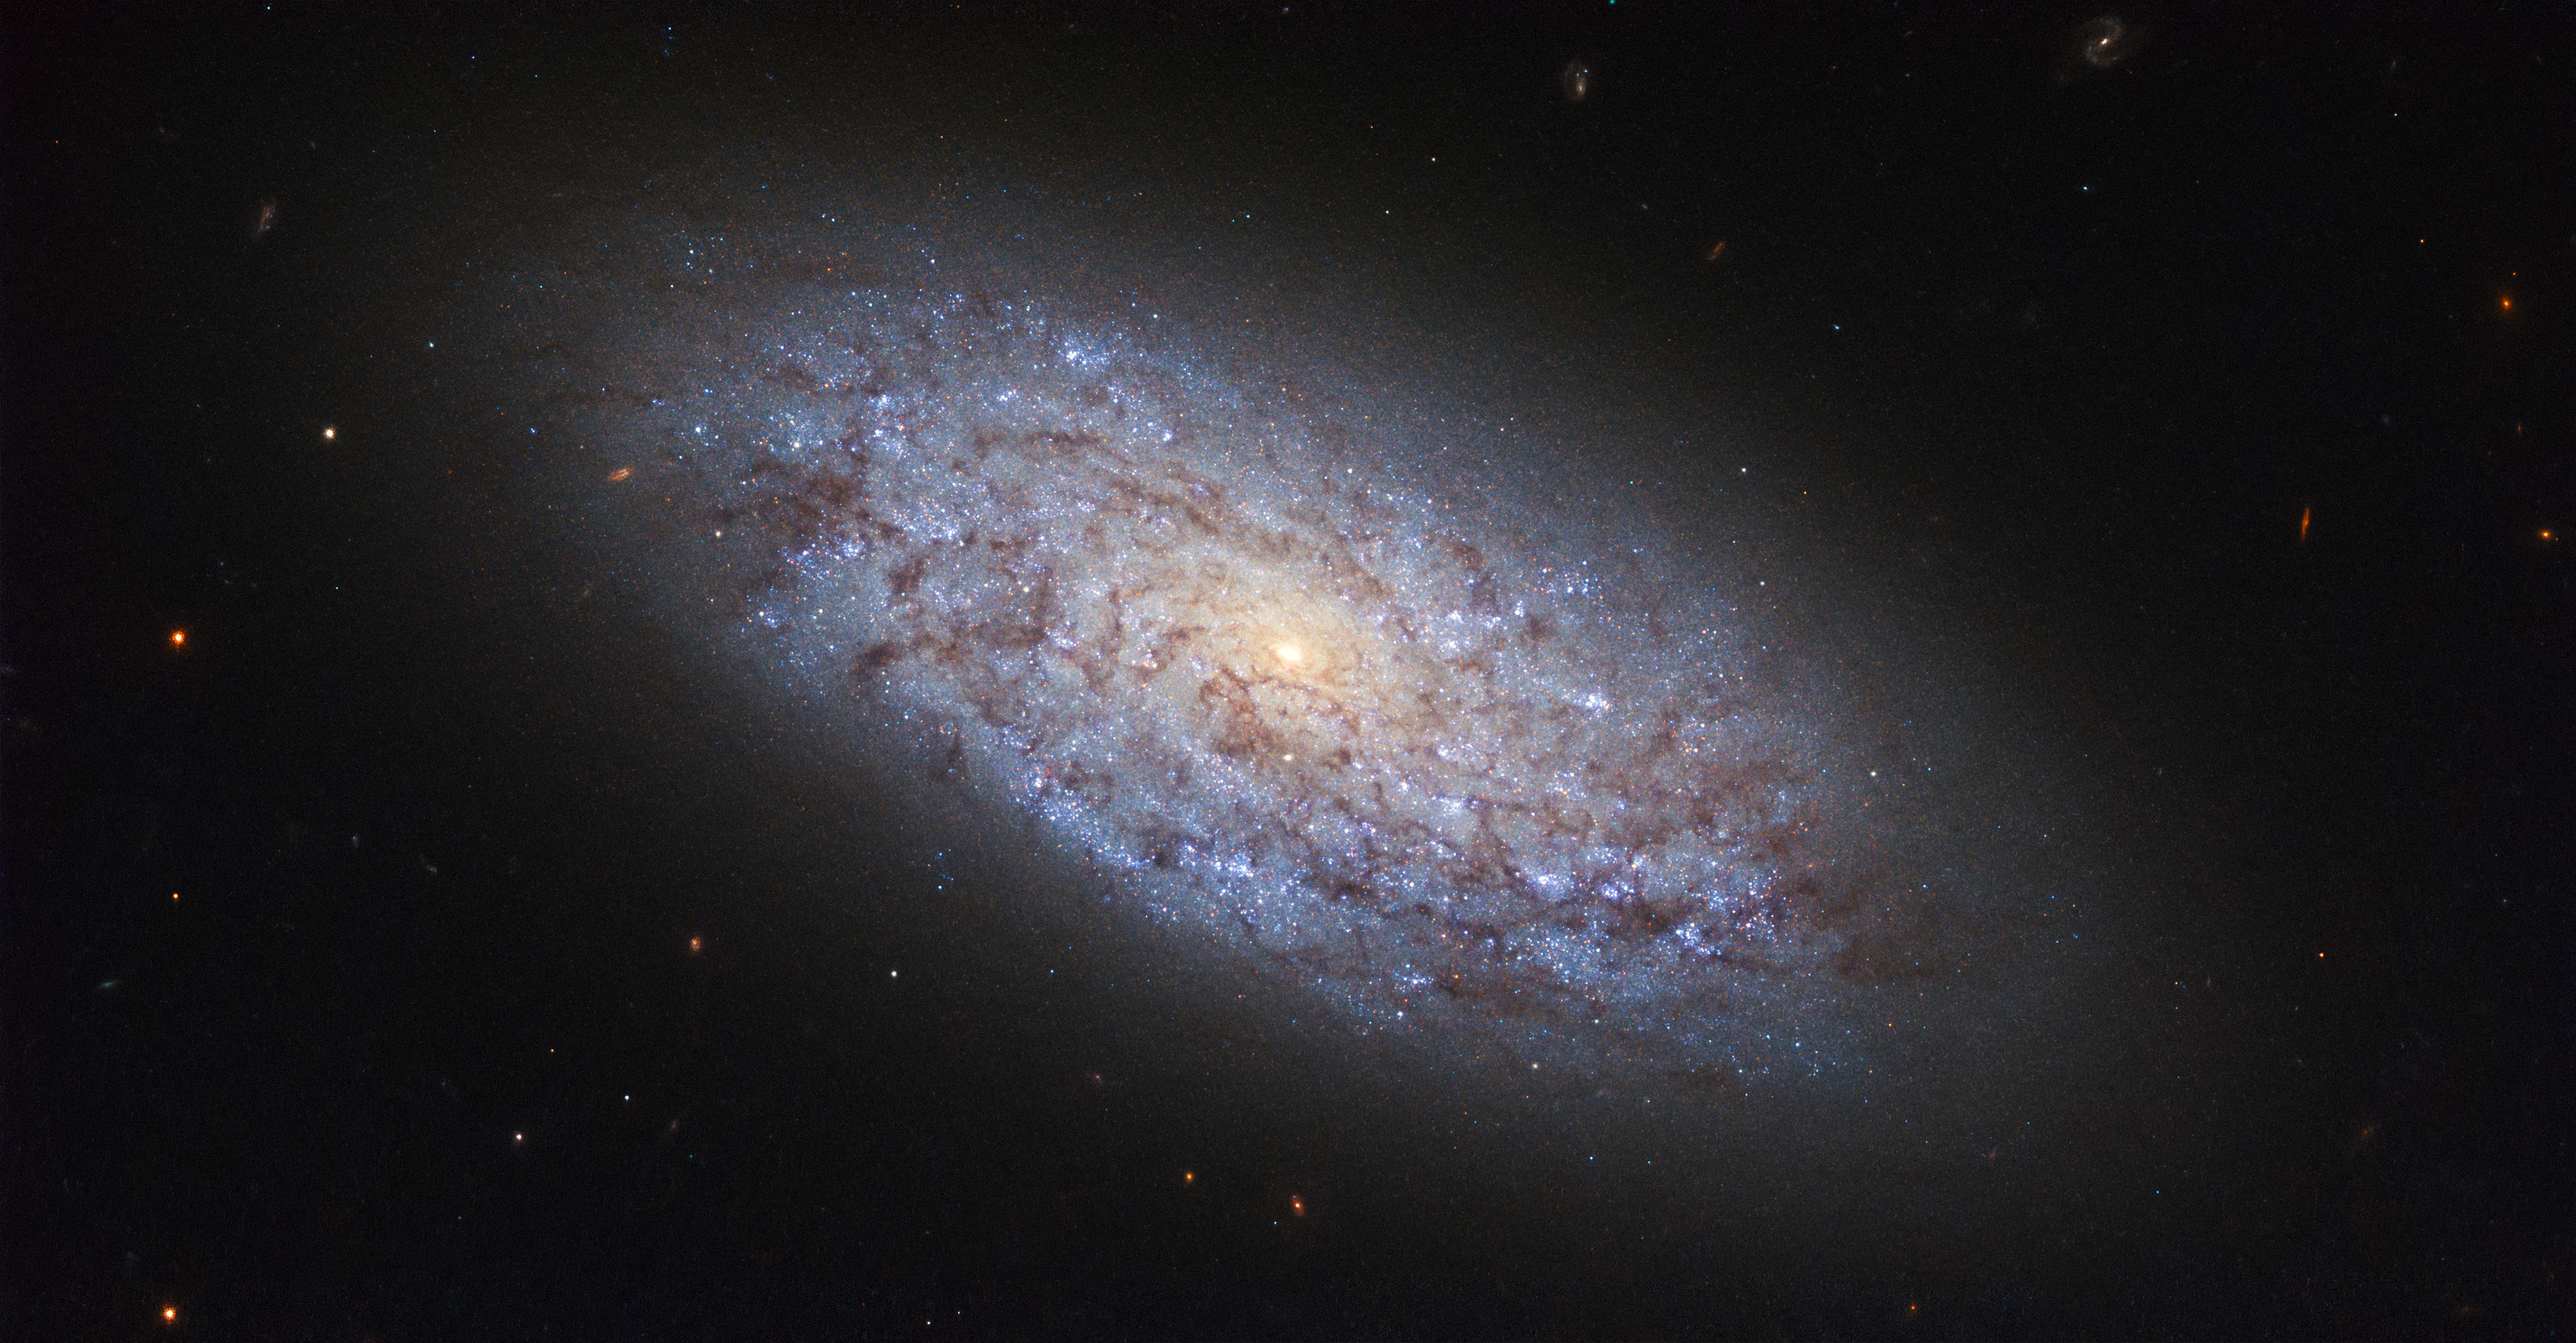

Small but significant

The subject of this NASA/ESA Hubble Space Telescope image is a dwarf galaxy named NGC 5949. Thanks to its proximity to Earth — it sits at a distance of around 44 million light-years from us, placing it within the Milky Way’s cosmic neighbourhood — NGC 5949 is a perfect target for astronomers to study dwarf galaxies.

With a mass of about a hundredth that of the Milky Way, NGC 5949 is a relatively bulky example of a dwarf galaxy. Its classification as a dwarf is due to its relatively small number of constituent stars, but the galaxy’s loosely-bound spiral arms also place it in the category of barred spirals. This structure is just visible in this image, which shows the galaxy as a bright yet ill-defined pinwheel. Despite its small proportions, NGC 5949’s proximity has meant that its light can be picked up by fairly small telescopes, something that facilitated its discovery by the astronomer William Herschel in 1801.

Astronomers have run into several cosmological quandaries when it comes to dwarf galaxies like NGC 5949. For example, the distribution of dark matter within dwarfs is quite puzzling (the “cuspy halo” problem), and our simulations of the Universe predict that there should be many more dwarf galaxies than we see around us (the “missing satellites” problem).

Credit: ESA/Hubble & NASA